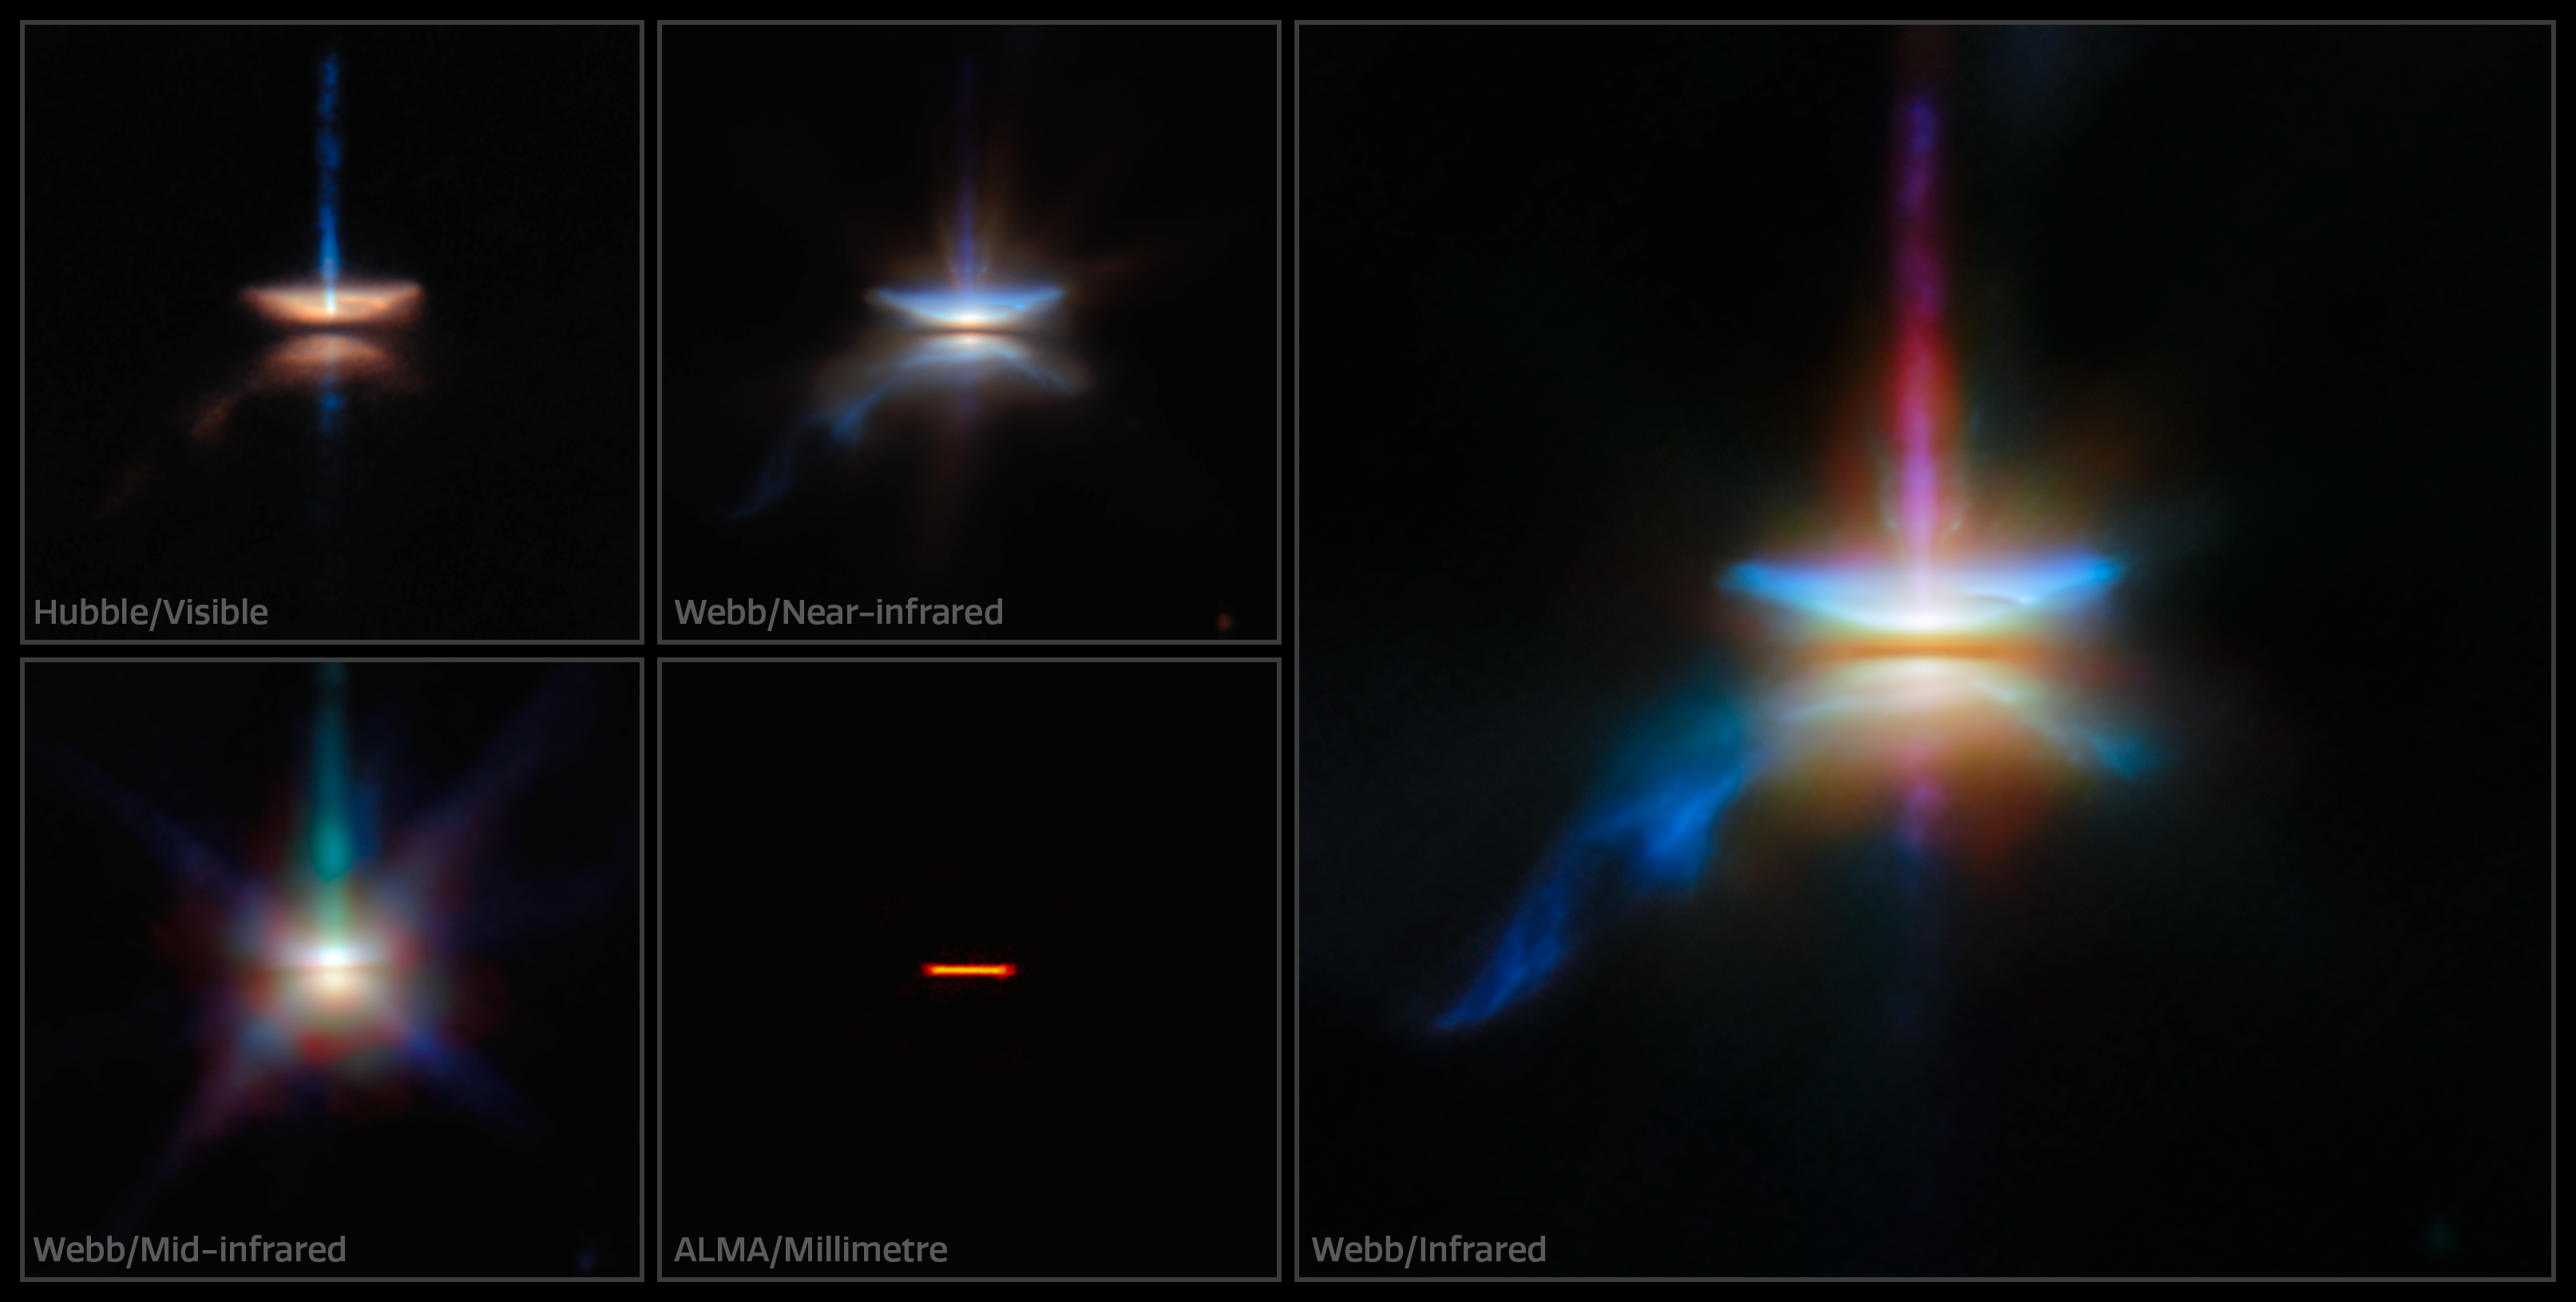

The many faces of HH 30

This new NASA/ESA/CSA James Webb Space Telescope Picture of the Month presents HH 30 in unprecedented resolution, complementing observations from the NASA/ESA Hubble Space Telescope and the Atacama Large Millimeter/submillimeter Array (ALMA). This target is an edge-on protoplanetary disc that is surrounded by jets and a disc wind, and is located in the dark cloud LDN 1551 in the Taurus Molecular Cloud.

Herbig-Haro objects, like HH 30, are luminous regions surrounding newborn stars (known as protostars). They form when stellar winds or jets of gas spewing from these newborn stars form shockwaves as they collide with nearby gas and dust at high speeds.

HH 30 is of particular interest to astronomers. In fact, the HH 30 disc is considered the prototype of an edge-on disc, thanks to its early discovery with the Hubble Space Telescope. Discs seen from this view are a unique laboratory to study the settling and drift of dust grains.

An international team of astronomers have used Webb to investigate the target in unprecedented detail. By combining Webb’s observations with those from Hubble and ALMA, the team was able to study the multiwavelength disc appearance of the system.

The four smaller images on the left show HH 30 as it appears at visible, near-infrared, millimetre, and mid-infrared wavelengths. The larger image on the right combines data from Webb’s Near-InfraRed Camera (NIRCam) and Mid-InfraRed Instrument (MIRI). The submillimetre image from ALMA, which shows the location of millimetre-sized dust grains, is dramatically different from the infrared and visible-light perspectives from Webb and Hubble. While the Webb and Hubble observations reveal delicate structures that extend into space, the ALMA observations show that the large dust grains are narrowly concentrated in the central plane of the disc.

These Webb observations were taken as part of the Webb GO programme #2562 (PI F. Ménard, K. Stapelfeldt), which aims to understand how dust evolves in edge-on discs like HH 30. Combined with the keen radio-wavelength eyes of ALMA, these observations show that large dust grains must migrate within the disc and settle in a thin layer. The creation of a narrow, dense layer of dust is an important stage in the process of planet formation. In this dense region, dust grains clump together to form pebbles and eventually planets themselves.

In addition to the behaviour of dust grains, the Webb, Hubble, and ALMA images reveal several distinct structures that are nested within one another. Emerging at a 90-degree angle from the narrow central disc is a high-velocity jet of gas. The narrow jet is surrounded by a wider, cone-shaped outflow. Enclosing the conical outflow is a wide nebula that reflects the light from the young star that is embedded within the disc. Together, these data reveal HH 30 to be a dynamic place, where tiny dust grains and massive jets alike play a role in the formation of new planets.

Credit: ESA/Webb, NASA & CSA, ESA/Hubble, ALMA (ESO/NAOJ/NRAO)